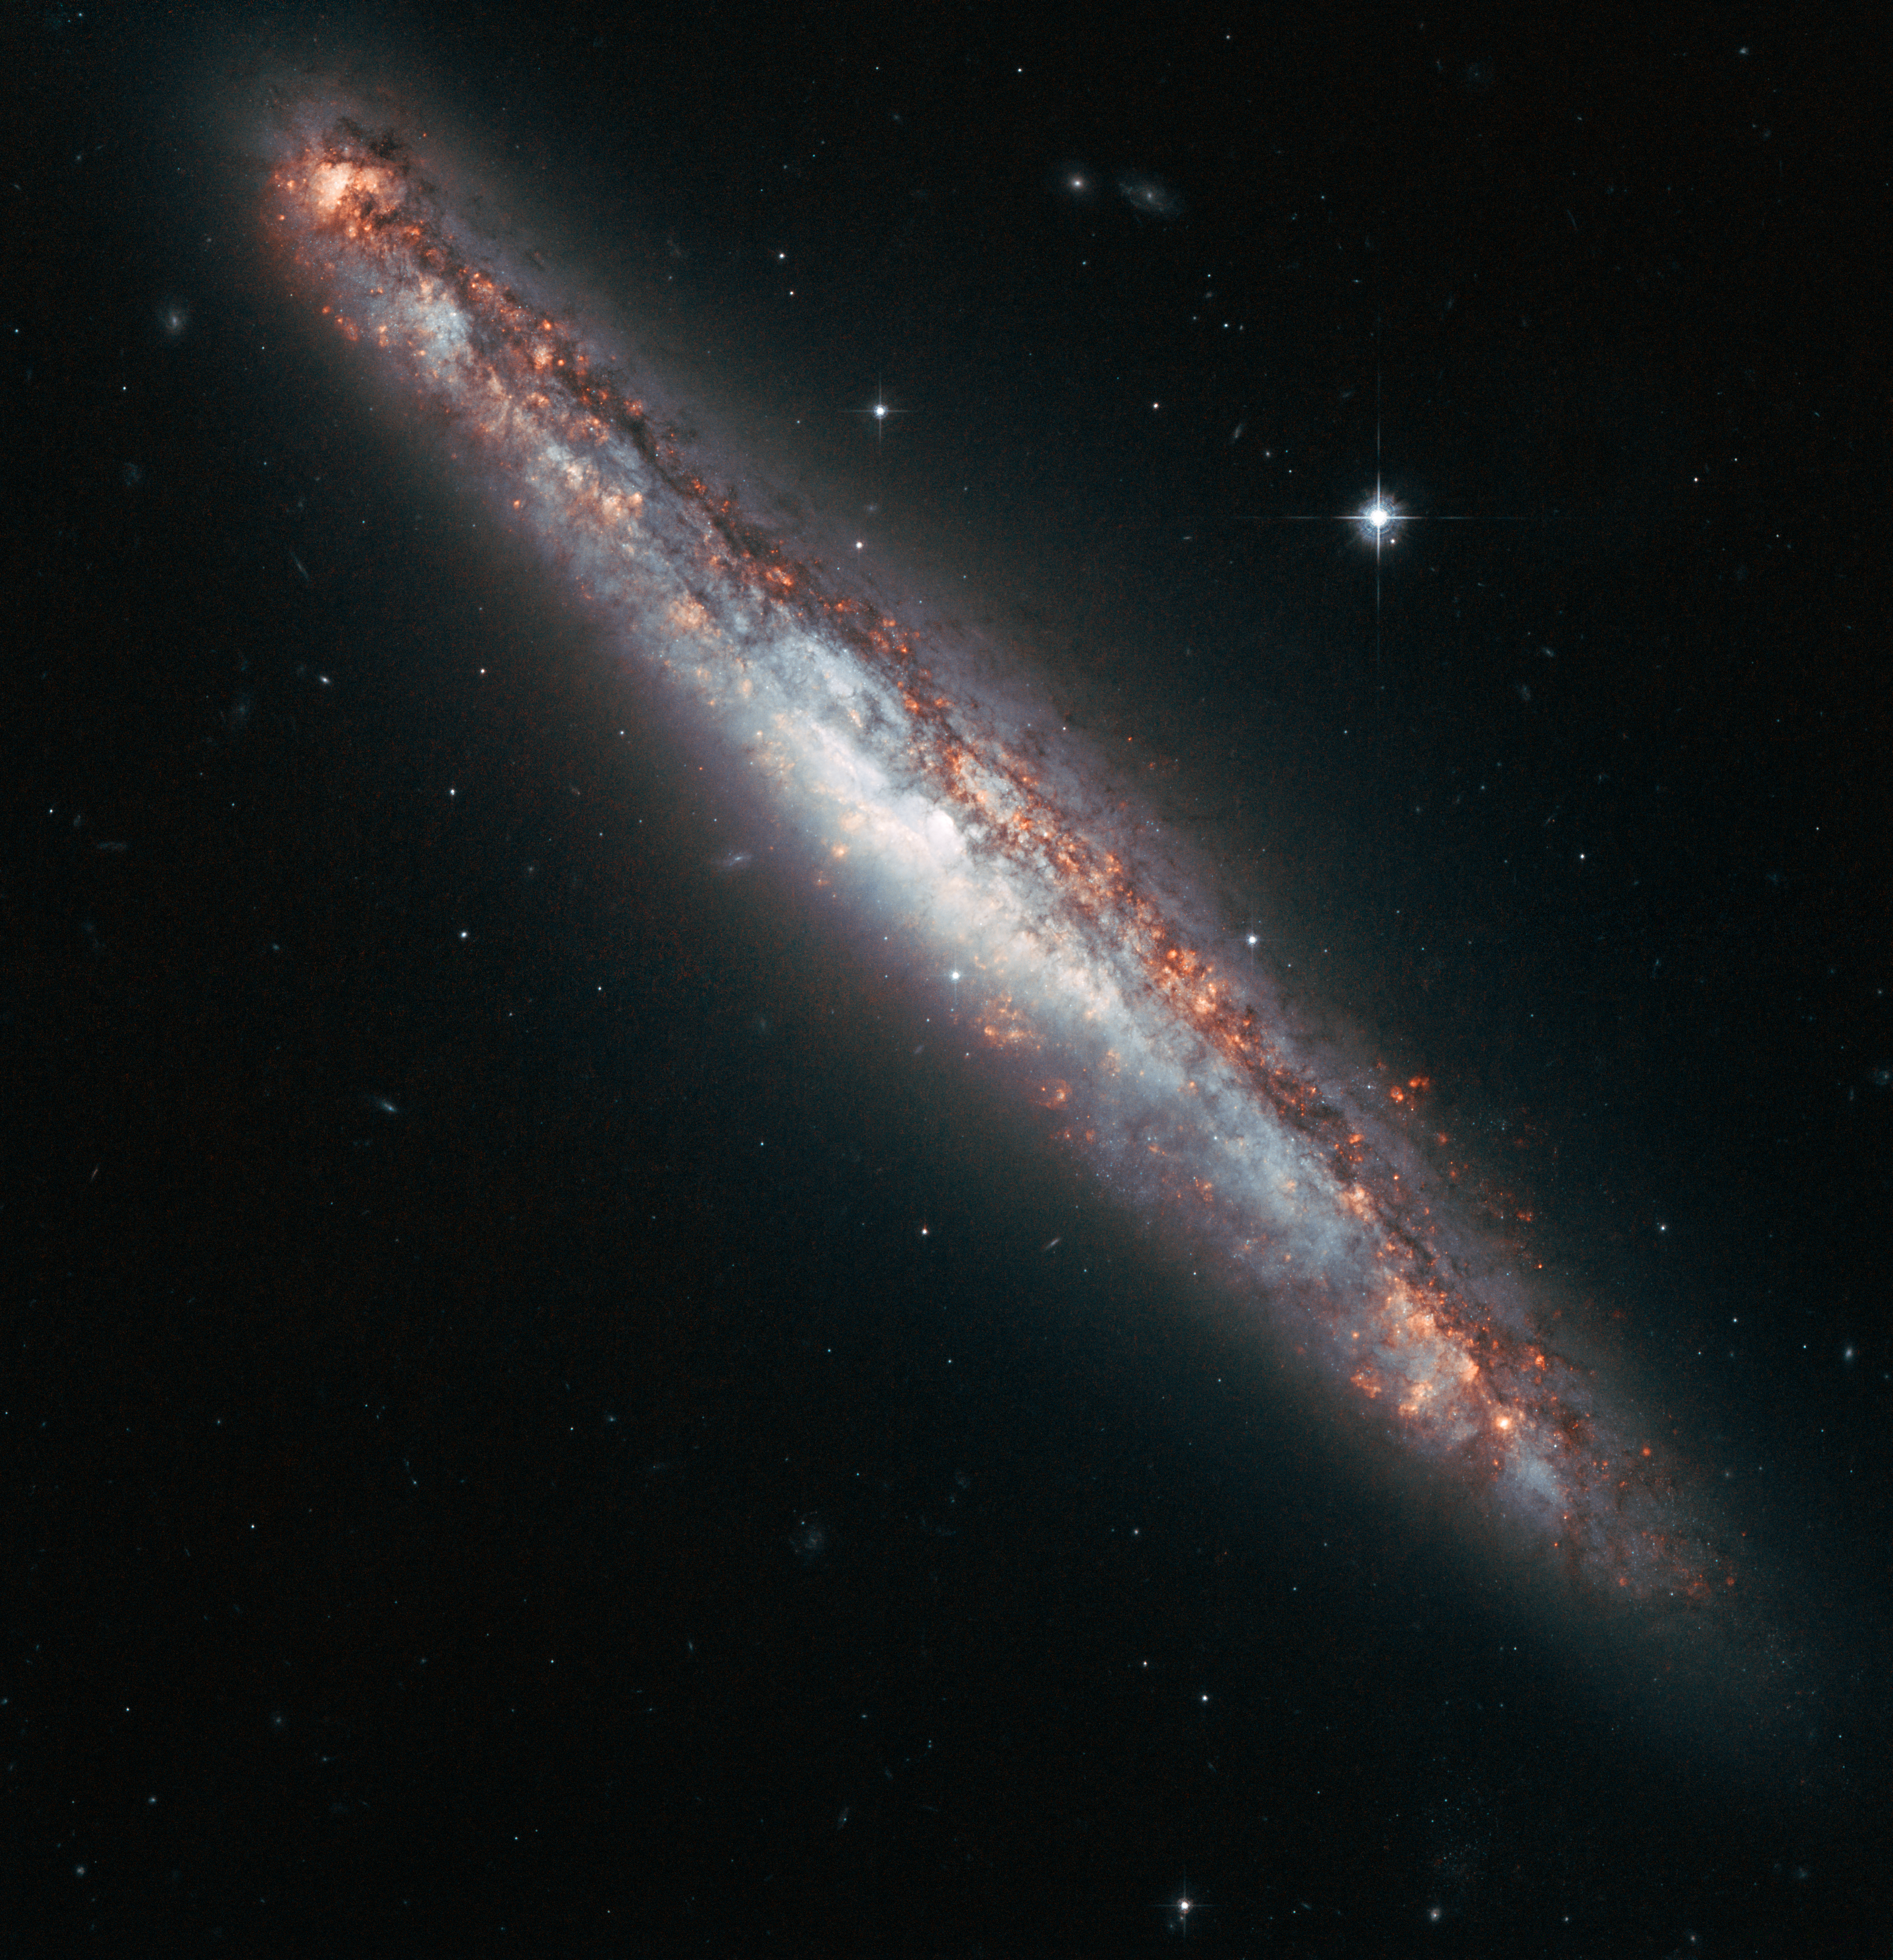

Galactic fountain of youth

This NASA/ESA Hubble Space Telescope image shows the edge-on profile of the slender spiral galaxy NGC 5775. Although the spiral is tilted away from us, with only a thin slither on view, such a perspective can be advantageous for astronomers because the regions above and below the galaxy’s disc can be seen much more clearly.

For instance, astronomers have previously used the high inclination of this spiral to study the properties of the halo of hot gas that is visible when the galaxy is observed at X-ray wavelengths. The mechanism behind such haloes is unclear, but they are found around spirals that have a high star formation rate, like NGC 5775. Some astronomers think that hot gas from the disc is driven into the halo by supernova explosions, which is then returned to the disc as it cools — like a massive galactic fountain.

Meanwhile, there is further disruption taking place in the disc of NGC 5775, as it is in the early stages of a galactic merger. Astronomers have observed bridges of hydrogen gas connecting this edge-on galaxy with a neighbouring face-on spiral (NGC 5774). But neither galaxy yet features a tidal tail — a disrupted stream of gas and stars that extends into space — which are commonplace in strongly interacting pairs, such as the Antennae Galaxies.

NGC 5775 and 5774 are members of the Virgo Cluster and lie at a distance of about 85 million light-years. This colour picture was created from images taken using the Wide Field Channel of Hubble’s Advanced Camera for Surveys. Images through a red filter (F625W) were coloured blue and images through a filter that isolates the glow from hydrogen gas (F658N) have been coloured red. The exposure times were 2292 s and 6848 s, respectively, and the field of view is 3.2 arcminutes across.

Credit: ESA/Hubble & NASA